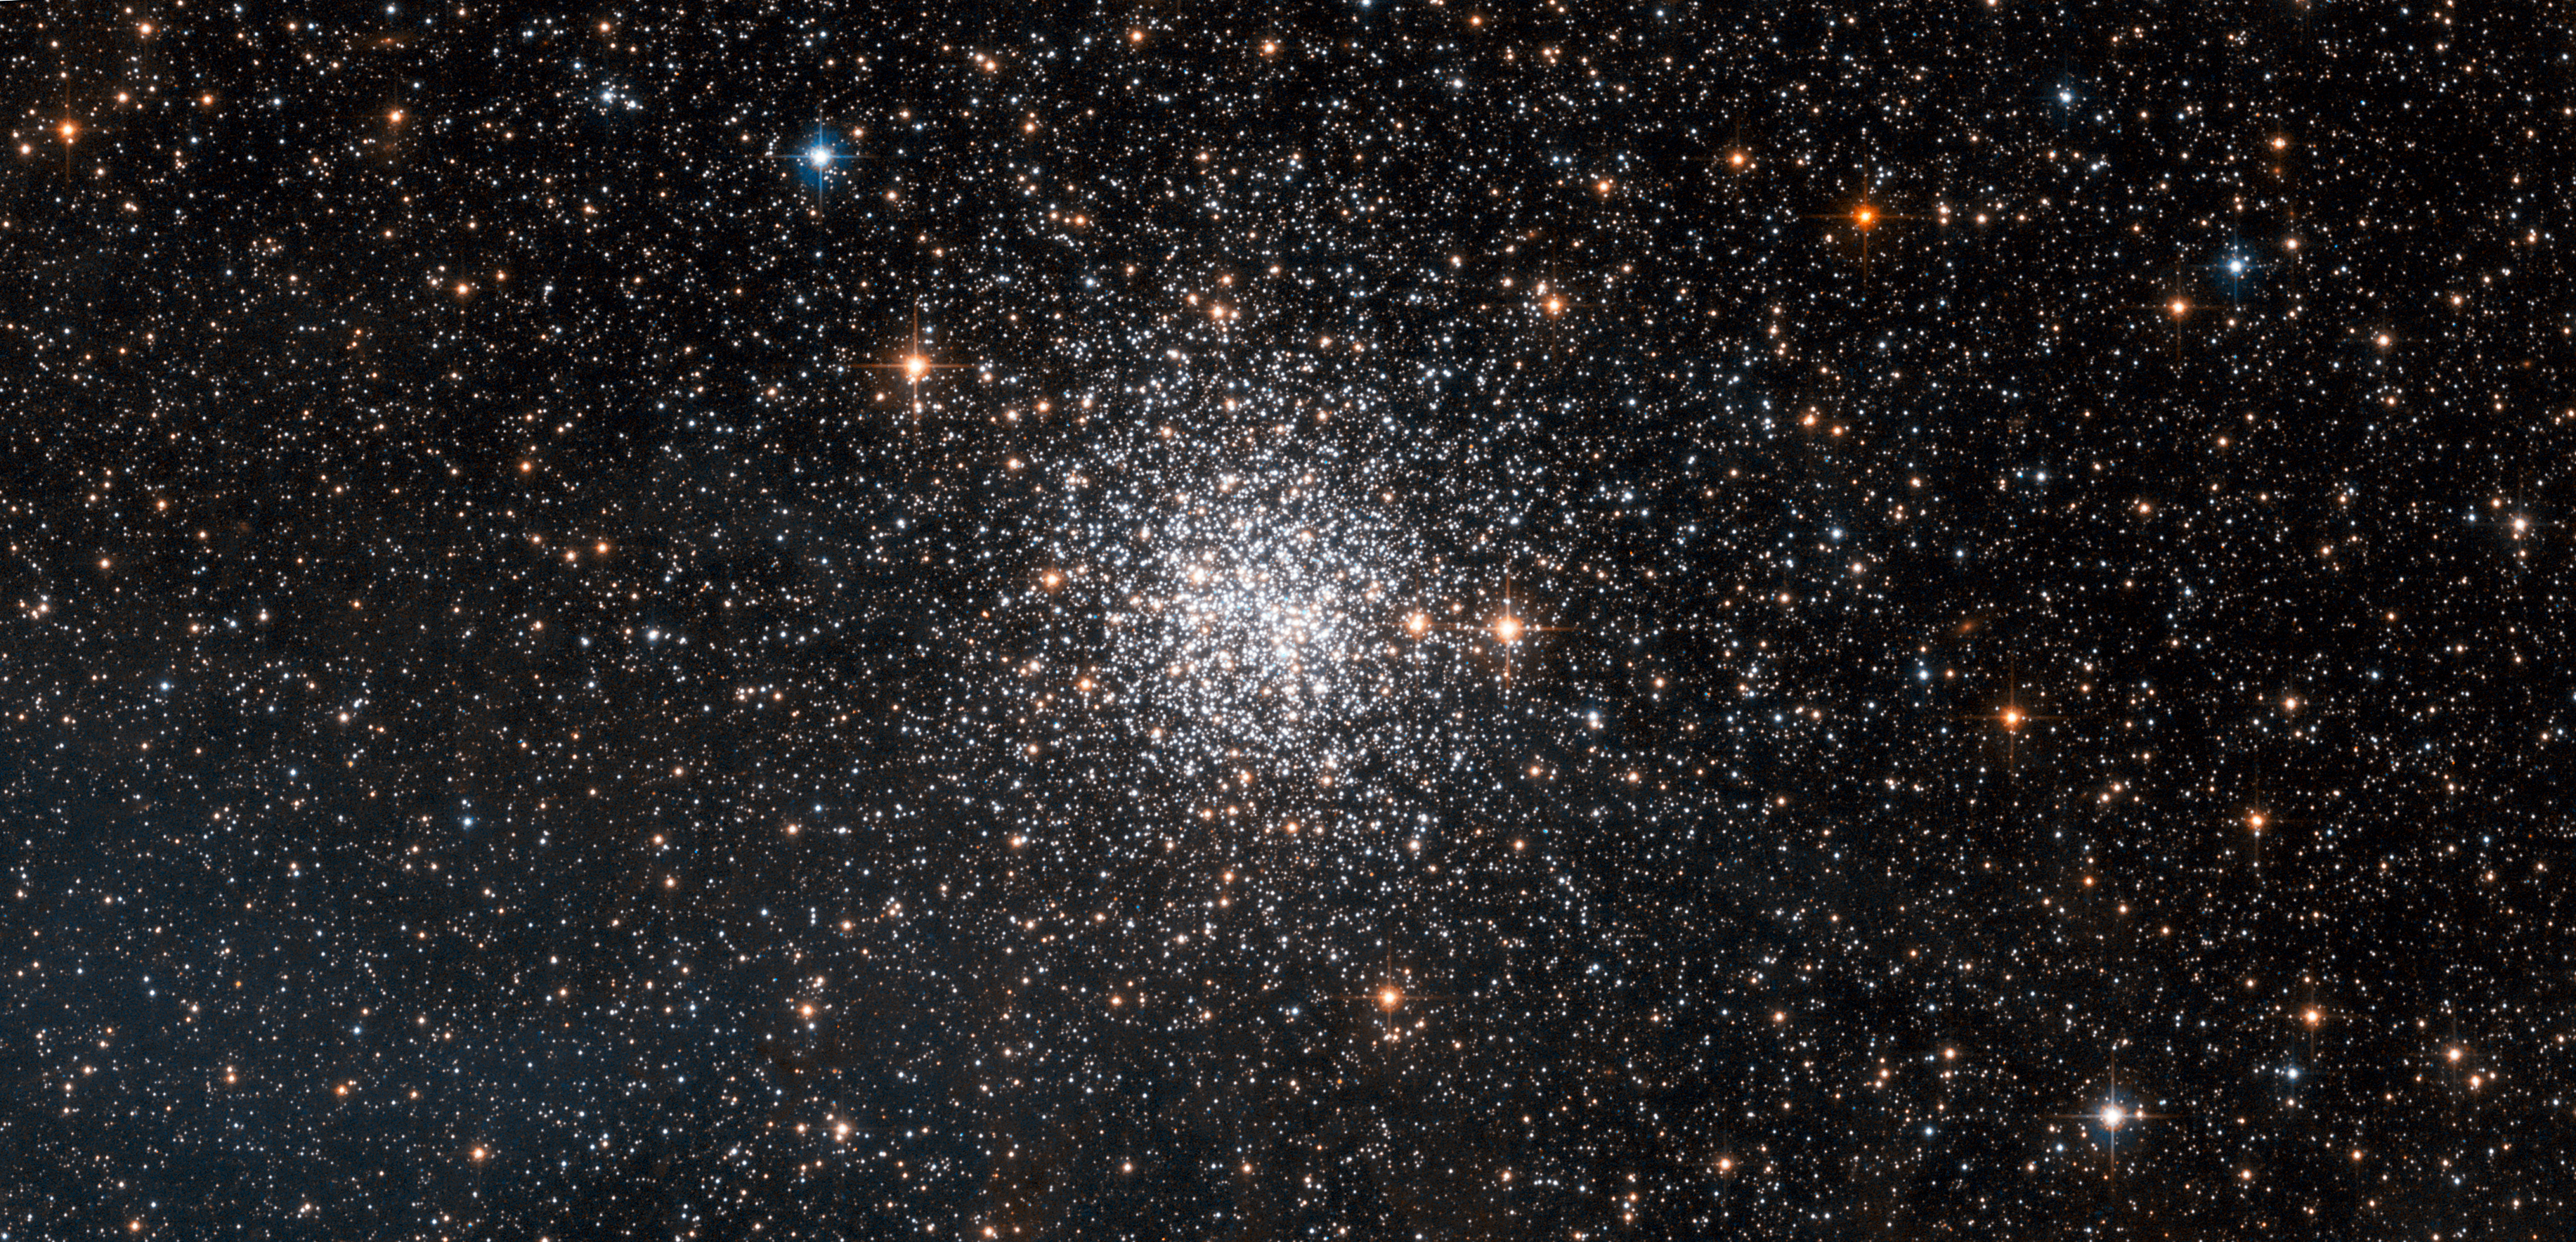

NGC 1872: open or globular cluster?

This spectacular NASA/ESA Hubble Space Telescope picture shows NGC 1872, a rich cluster of thousands of stars lying in our small neighbouring galaxy, the Large Magellanic Cloud. This little-studied cluster is located in the constellation of Dorado (the Dolphinfish, a fish unrelated to the dolphin and which often appears on dinner menus under its Hawaiian name mahi-mahi). The Scottish astronomer James Dunlop was probably the first to spot NGC 1872 in 1826 with a small telescope near Sydney in Australia.

Clusters are very interesting to astronomers because the stars in them all formed together in both space and time and hence the stars we see now are of similar ages and similar initial composition. Cluster studies have been vital in working out how stars evolve and the power of Hubble allows these studies to be taken beyond our own Milky Way and out into the Local Group of our neighbouring galaxies.

Star clusters are usually classed as either open or globular but NGC 1872 has characteristics of both — it is as rich as a typical globular but is much younger, and, like many open clusters, has bluer stars. Such intermediate clusters are common in the Large Magellanic Cloud.

This image was acquired using the Wide Field Channel of the Advanced Camera for Surveys on the Hubble Space Telescope. It was created from images taken through yellow (F555W) and near-infrared (F814W) filters, coloured blue and red in the image. The exposure times were 115 s and 90 s respectively and the field of view is about 3.0 by 1.5 arcminutes.

Credit: ESA/Hubble and NASA